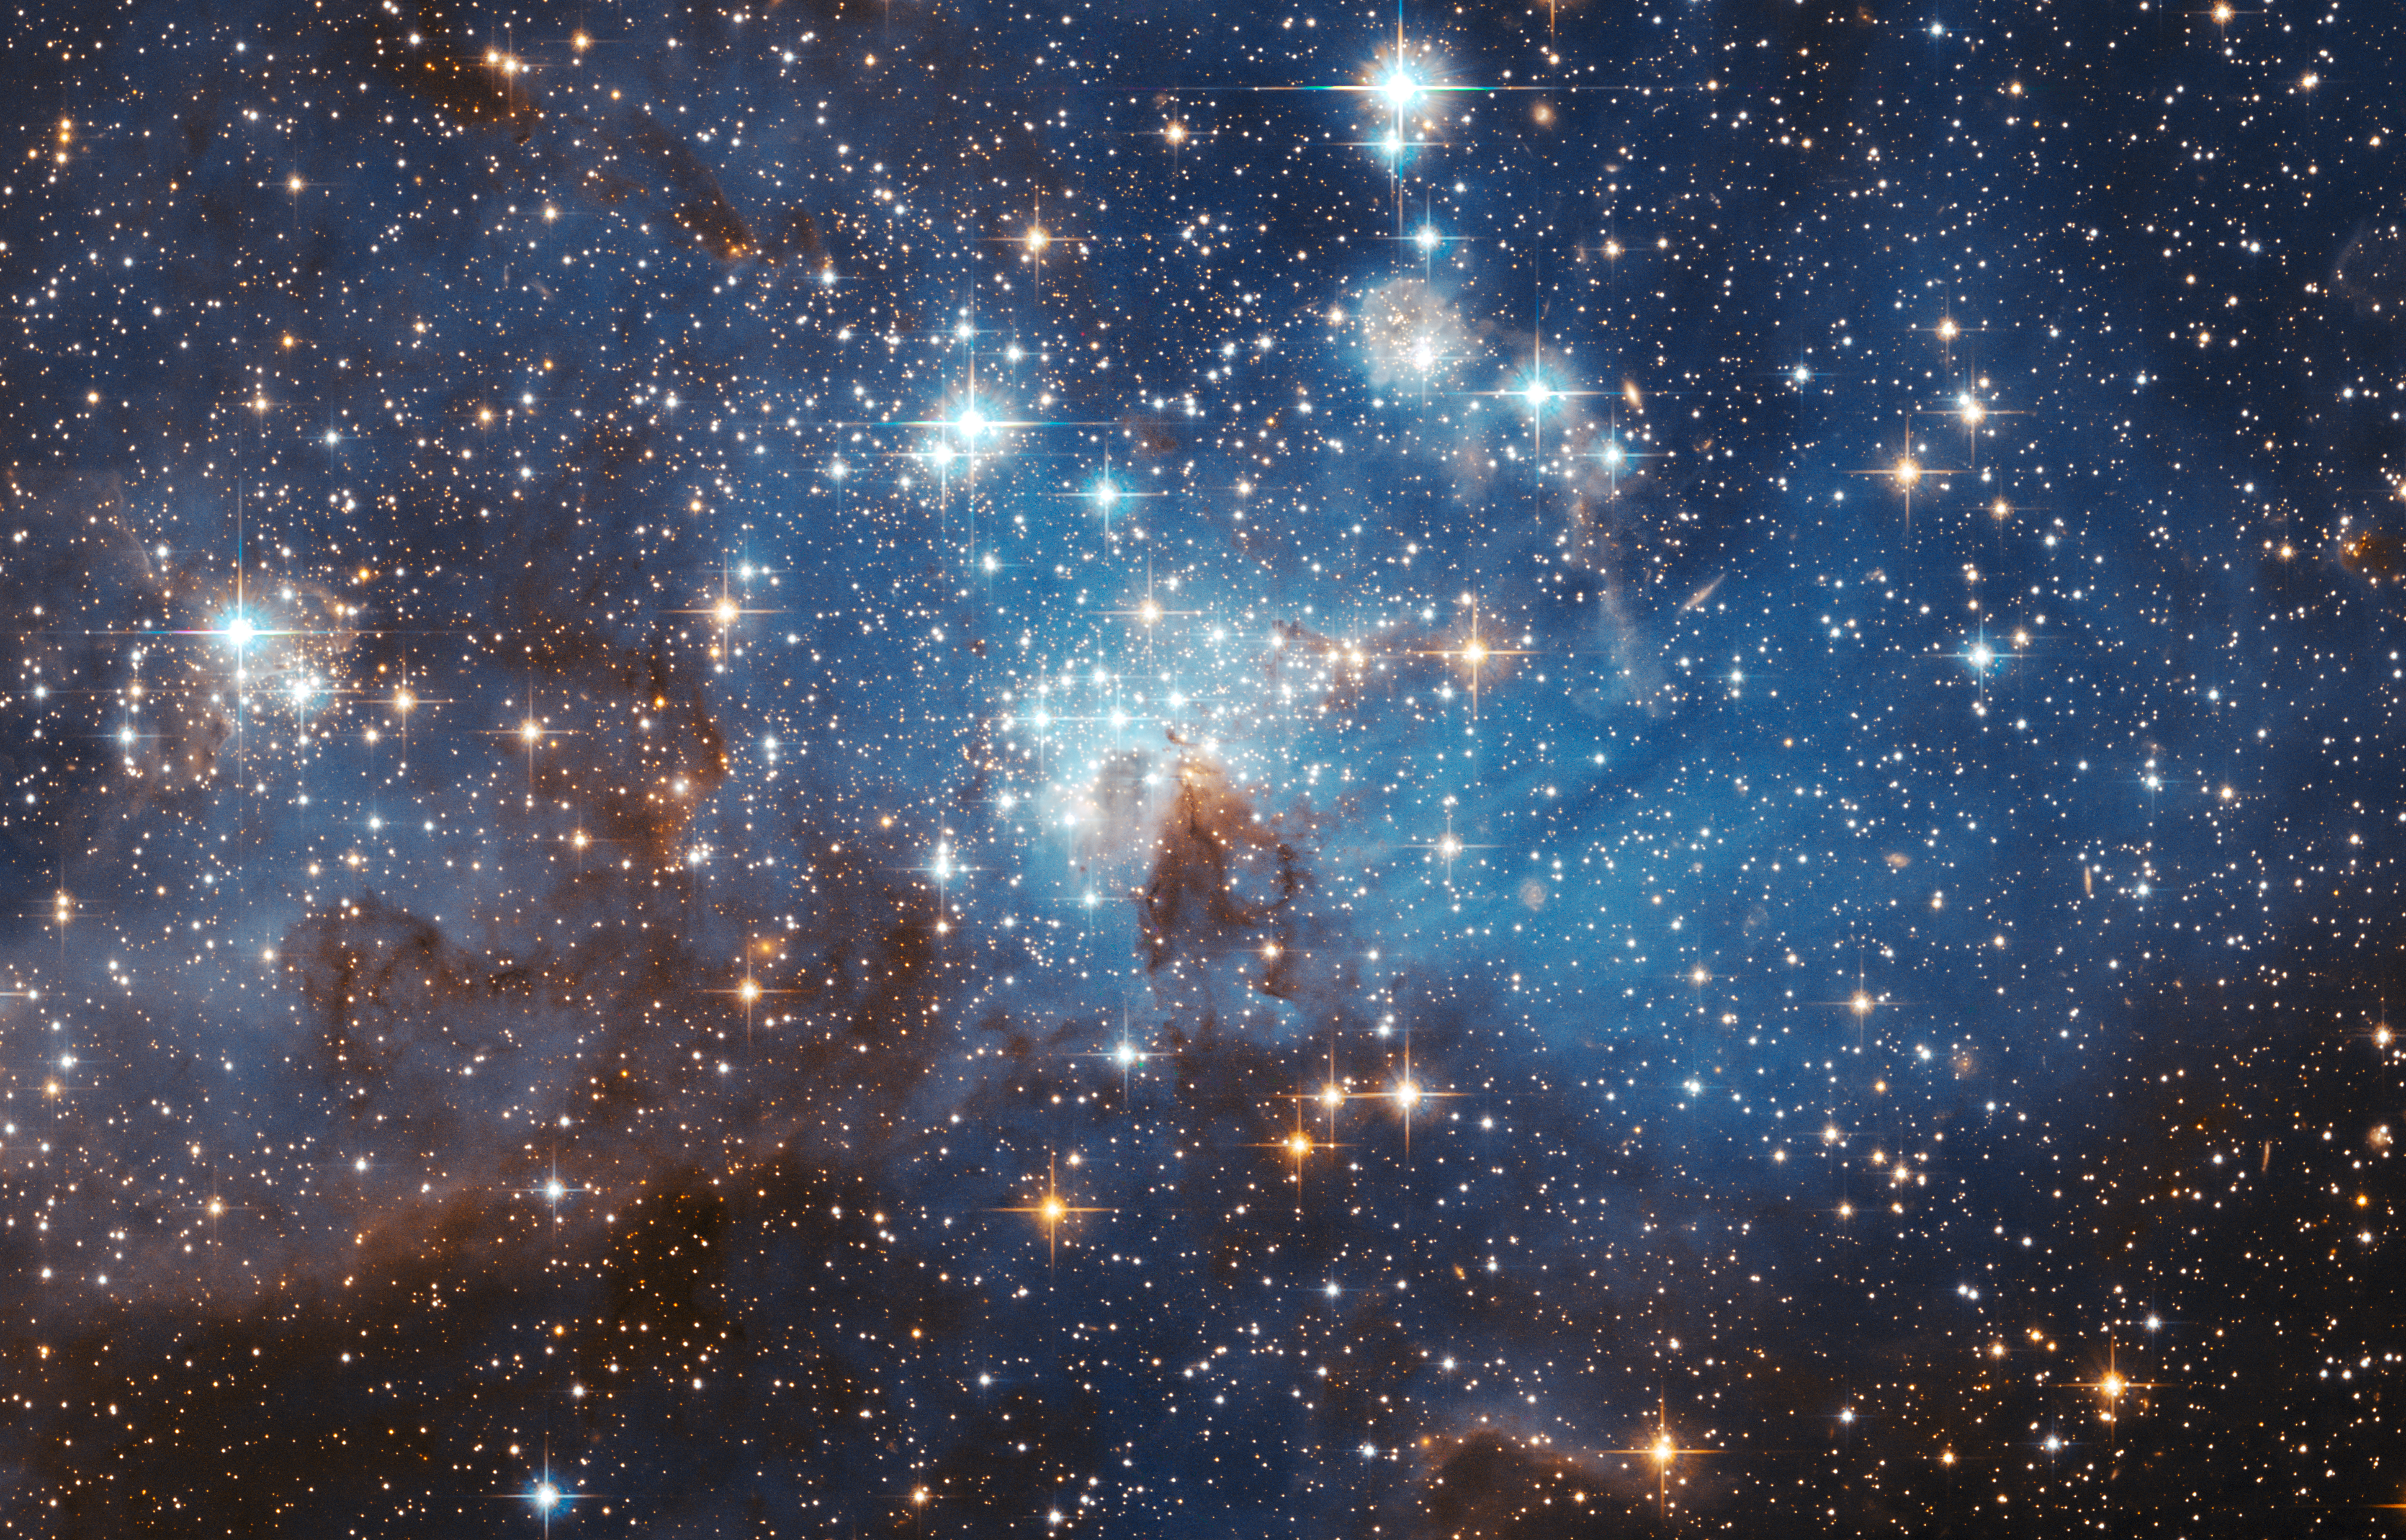

Large and small stars in harmonious coexistence

The latest photo from the Hubble Space Telescope, presented at the 2006 General Assembly of the International Astronomical Union in Prague this week, shows a star forming region in the Large Magellanic Cloud (LMC). This sharp image reveals a large number of low-mass infant stars coexisting with young massive stars.

Credit: NASA, ESA